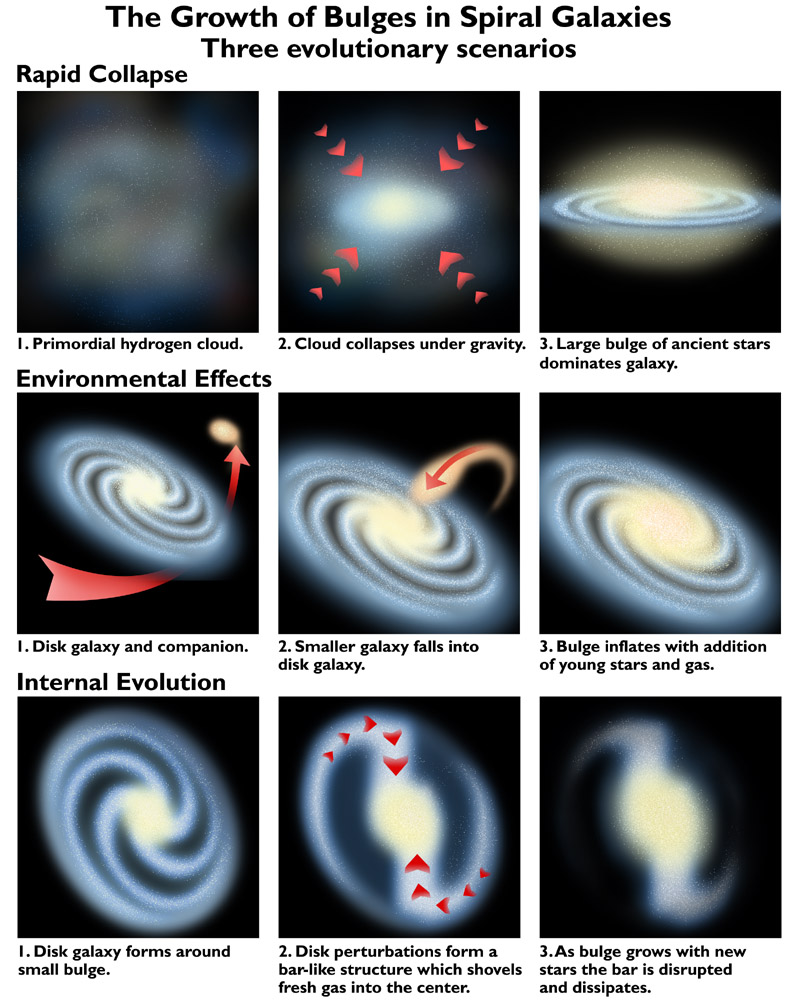

The growth of bulges in spiral galaxies

This diagram shows three evolutionary scenarios for the growth of bulges in spiral galaxies, derived from a scientific study done using Hubble Space Telescope, in 1999.

Credit: NASA & ESA